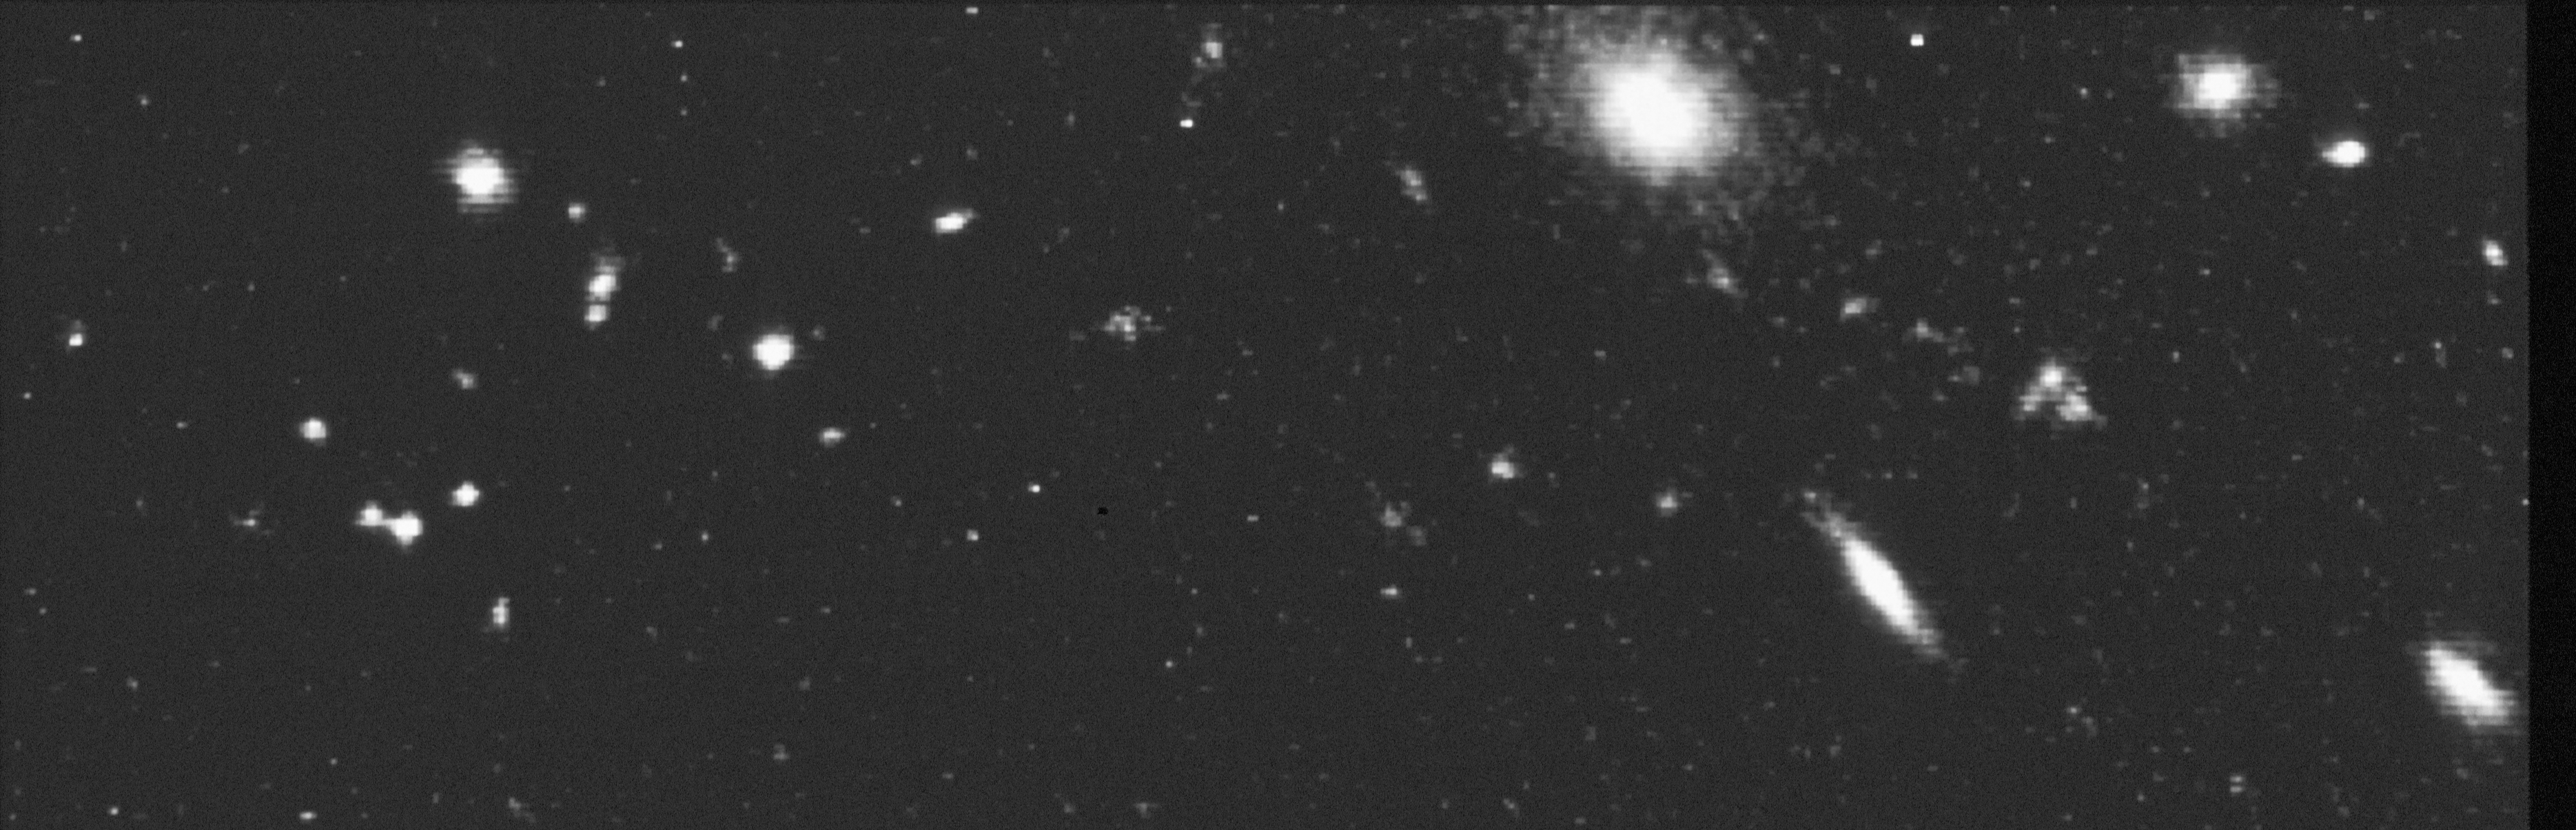

The farthest cluster of galaxies ever seen?

This NASA/ESA Hubble Space Telescope image reveals one of the faintest and probably farthest clusters of galaxies ever seen. The cluster contains about 30 very faint objects which are unusually small and compact in appearance. (The larger objects are foreground galaxies located in a separate galaxy cluster four billion light-years away). These lumpy spots do not appear to resemble the elliptical and spiral galaxies of today. The objects might not be separate galaxies but rather sites of strong star formation embedded within primordial galaxies which are too faint to be seen in this HST exposure.

The colours of these objects (measured with the Mount Palomar 200-inch telescope), place the cluster at a distance of at least seven billion light-years (redshift z > 1.)

Credit: Alan Dressier, Carnegie Institution, and NASA/ESA Co-Investigators:Augustus Oemler (Yale University), James E. Gunn (Princeton University), Harvey Butcher(the Netherlands Foundation for Research in Astronomy).